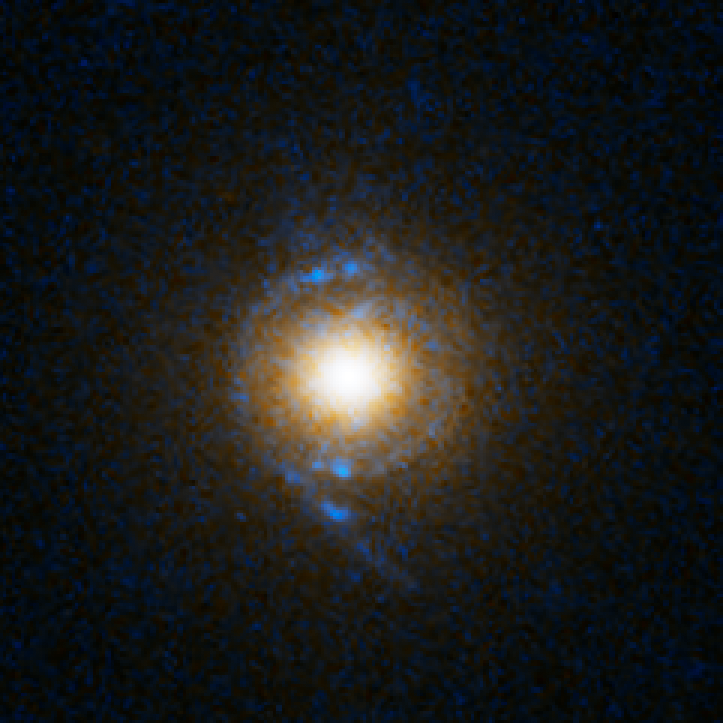

Einstein Ring Gravitational Lens: SDSS J125028.25+052349.0

This object is named SDSS J125028.25+052349.0. It is one of eight similar objects found by combining two powerful astronomical assets, the Sloan Digital Sky Survey (SDSS) and NASA's Hubble Space Telescope.

The objects are know as ‘Eienstein rings’ and are perhaps the most elegant manifestations of the gravitational lensing phenomina. Gravitational lensing occurs when the gravitational field from a massive object warps space and deflects light from a distant object behind it, allowing the distant object to be seen. Einstein rings are produced when two galaxies are almost perfectly aligned, one behind the other, giving an image like this with a reddish-white elliptical galaxy in the foreground and a thin ring of blue surrounding it — which is in fact the distorted light from another galaxy twice as far away.

Credit: NASA, ESA, A. Bolton (Harvard-Smithsonian CfA) and the SLACS Team